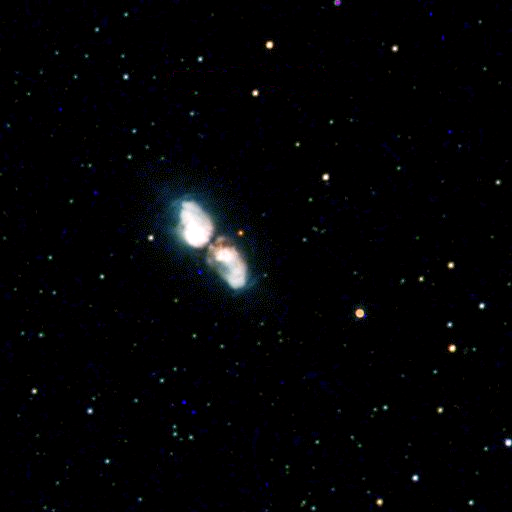

The Silkworm Nebula

The Hubble Space Telescope's Wide Field and Planetary Camera 2has captured images of the birth of two planetary nebulae as they emerge from wrappings of gas and dust, like butterflies breaking out of their cocoons.

Credit: Sun Kwok and Kate Su (University of Calgary), Bruce Hrivnak (Valparaiso University), and NASA/ESA